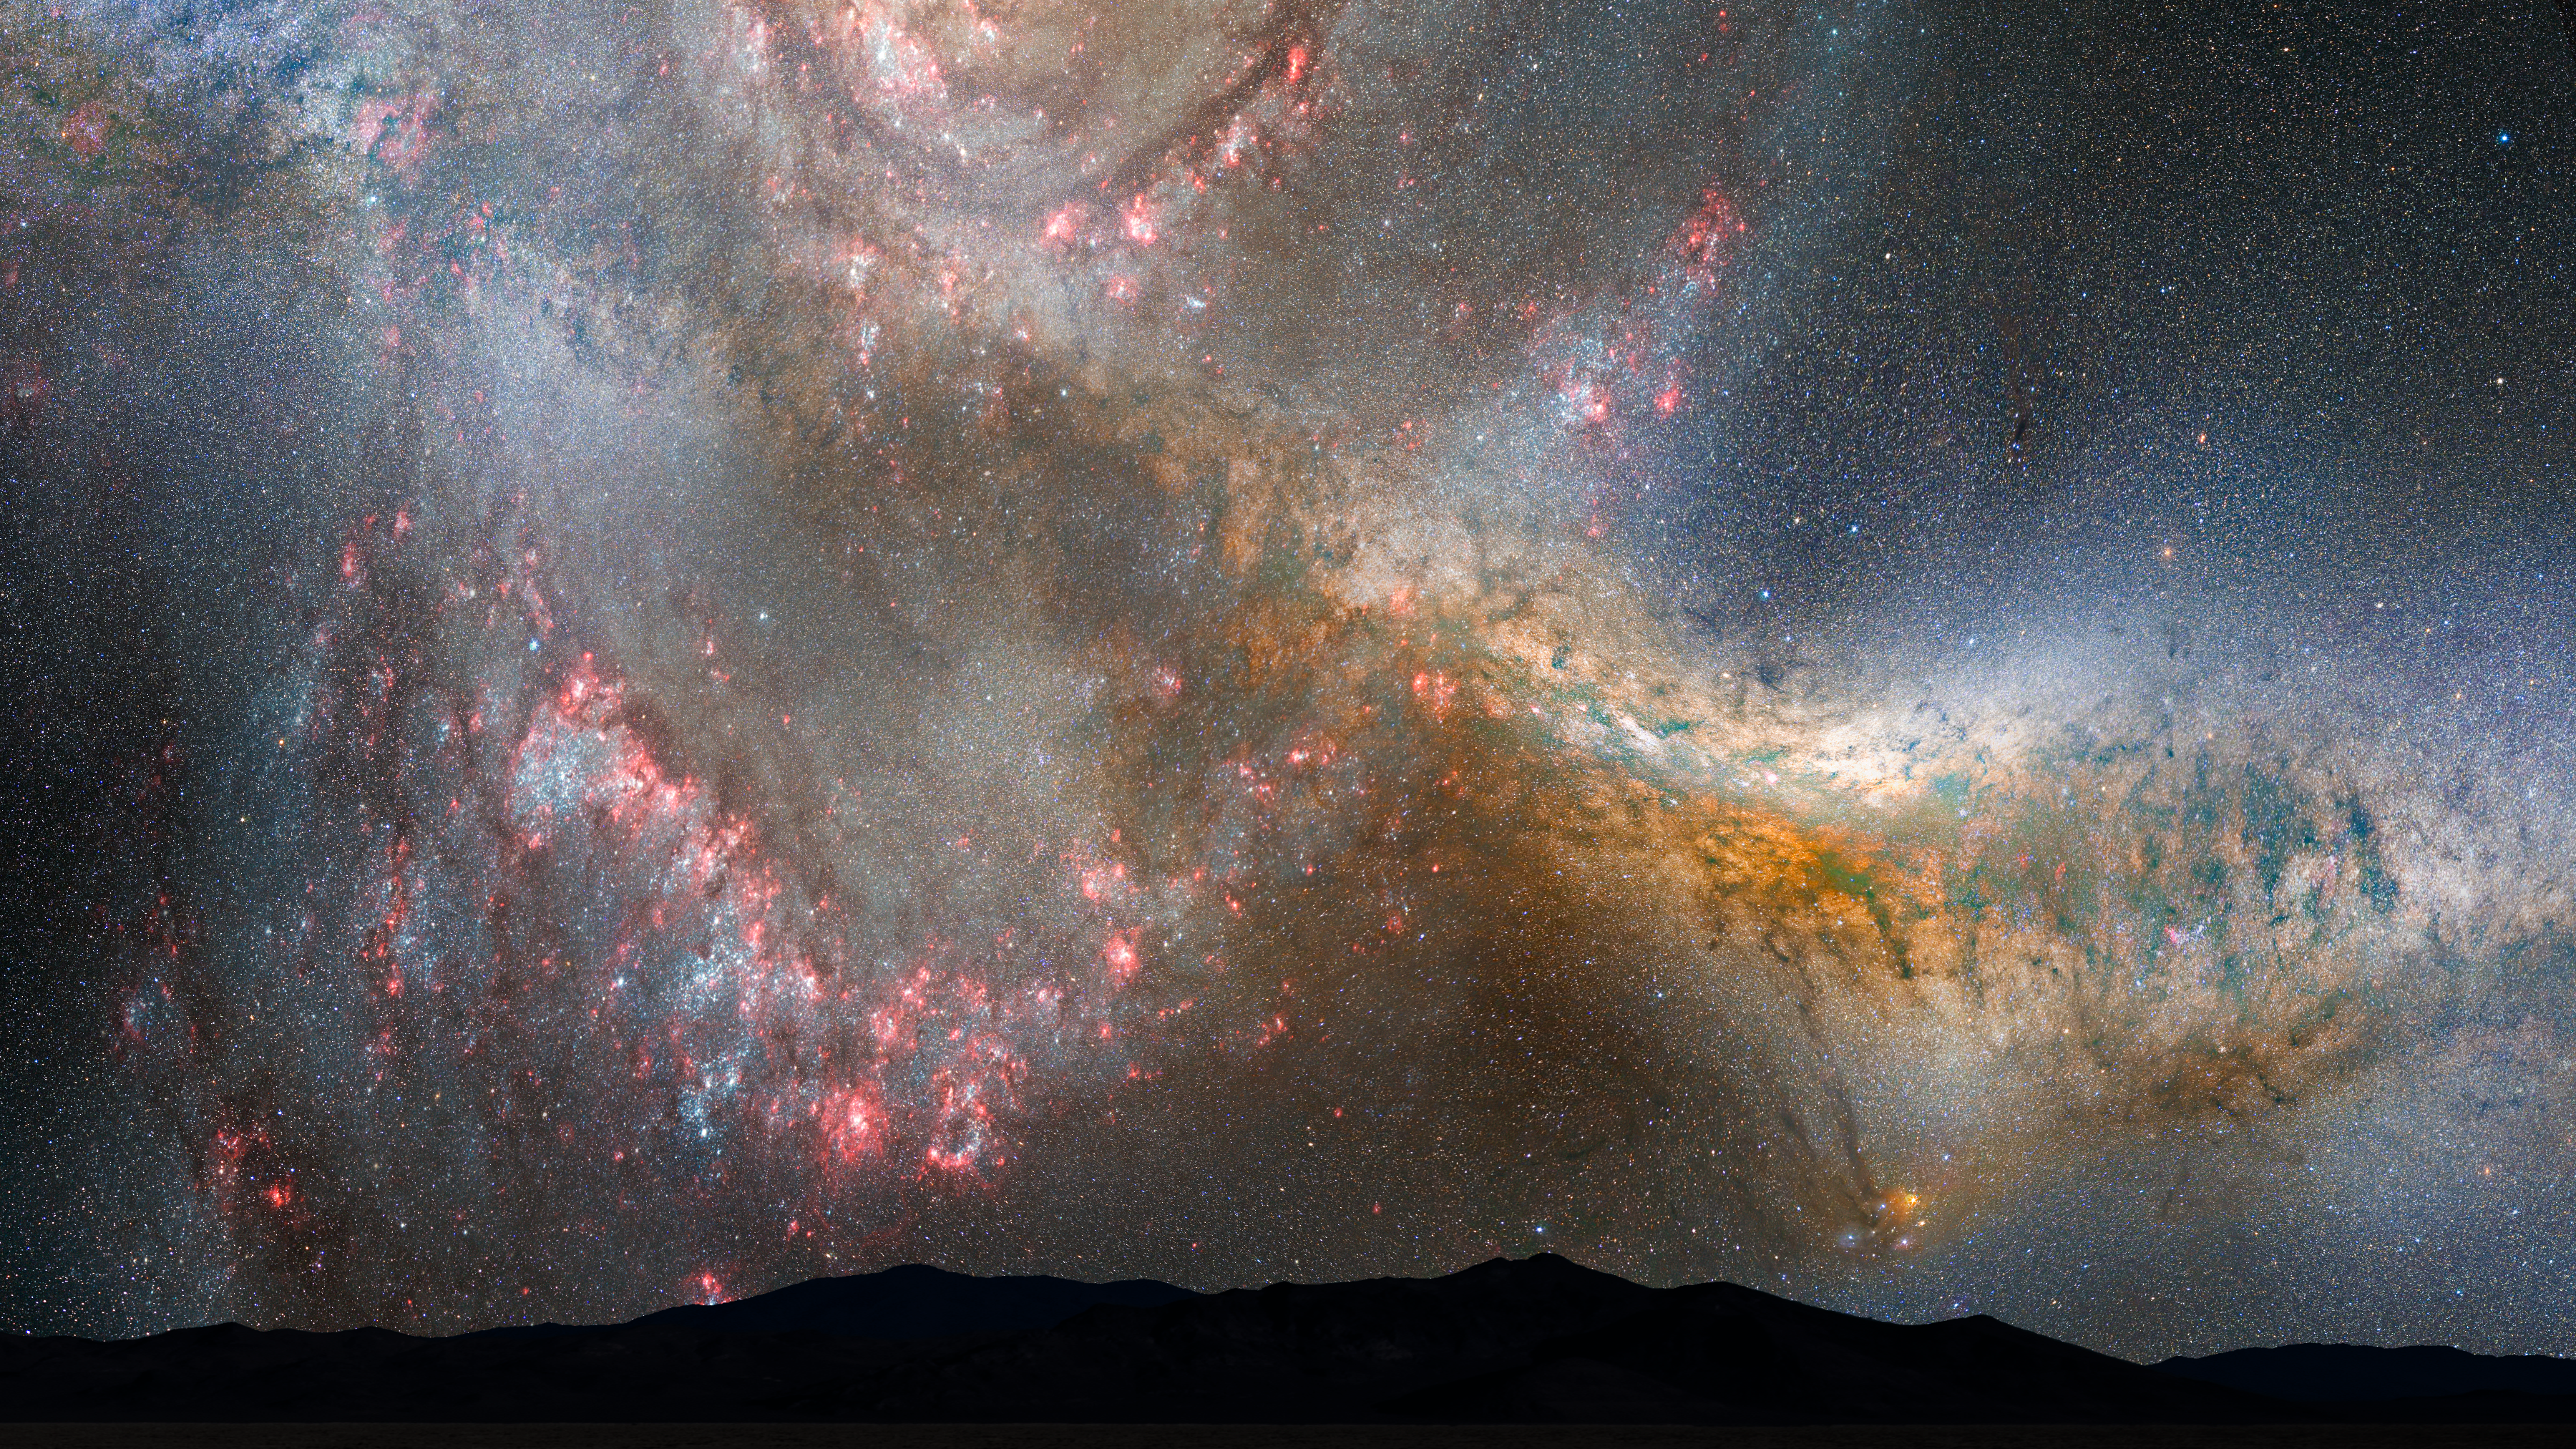

Nighttime Sky View of Future Galaxy Merger: 3.85-3.9 Billion Years

During the first close approach, the sky is ablaze with new star formation, which is evident in a plethora of emission nebulae and open young star clusters.

Credit: NASA, ESA, Z. Levay and R. van der Marel (STScI), T. Hallas, and A. Mellinger